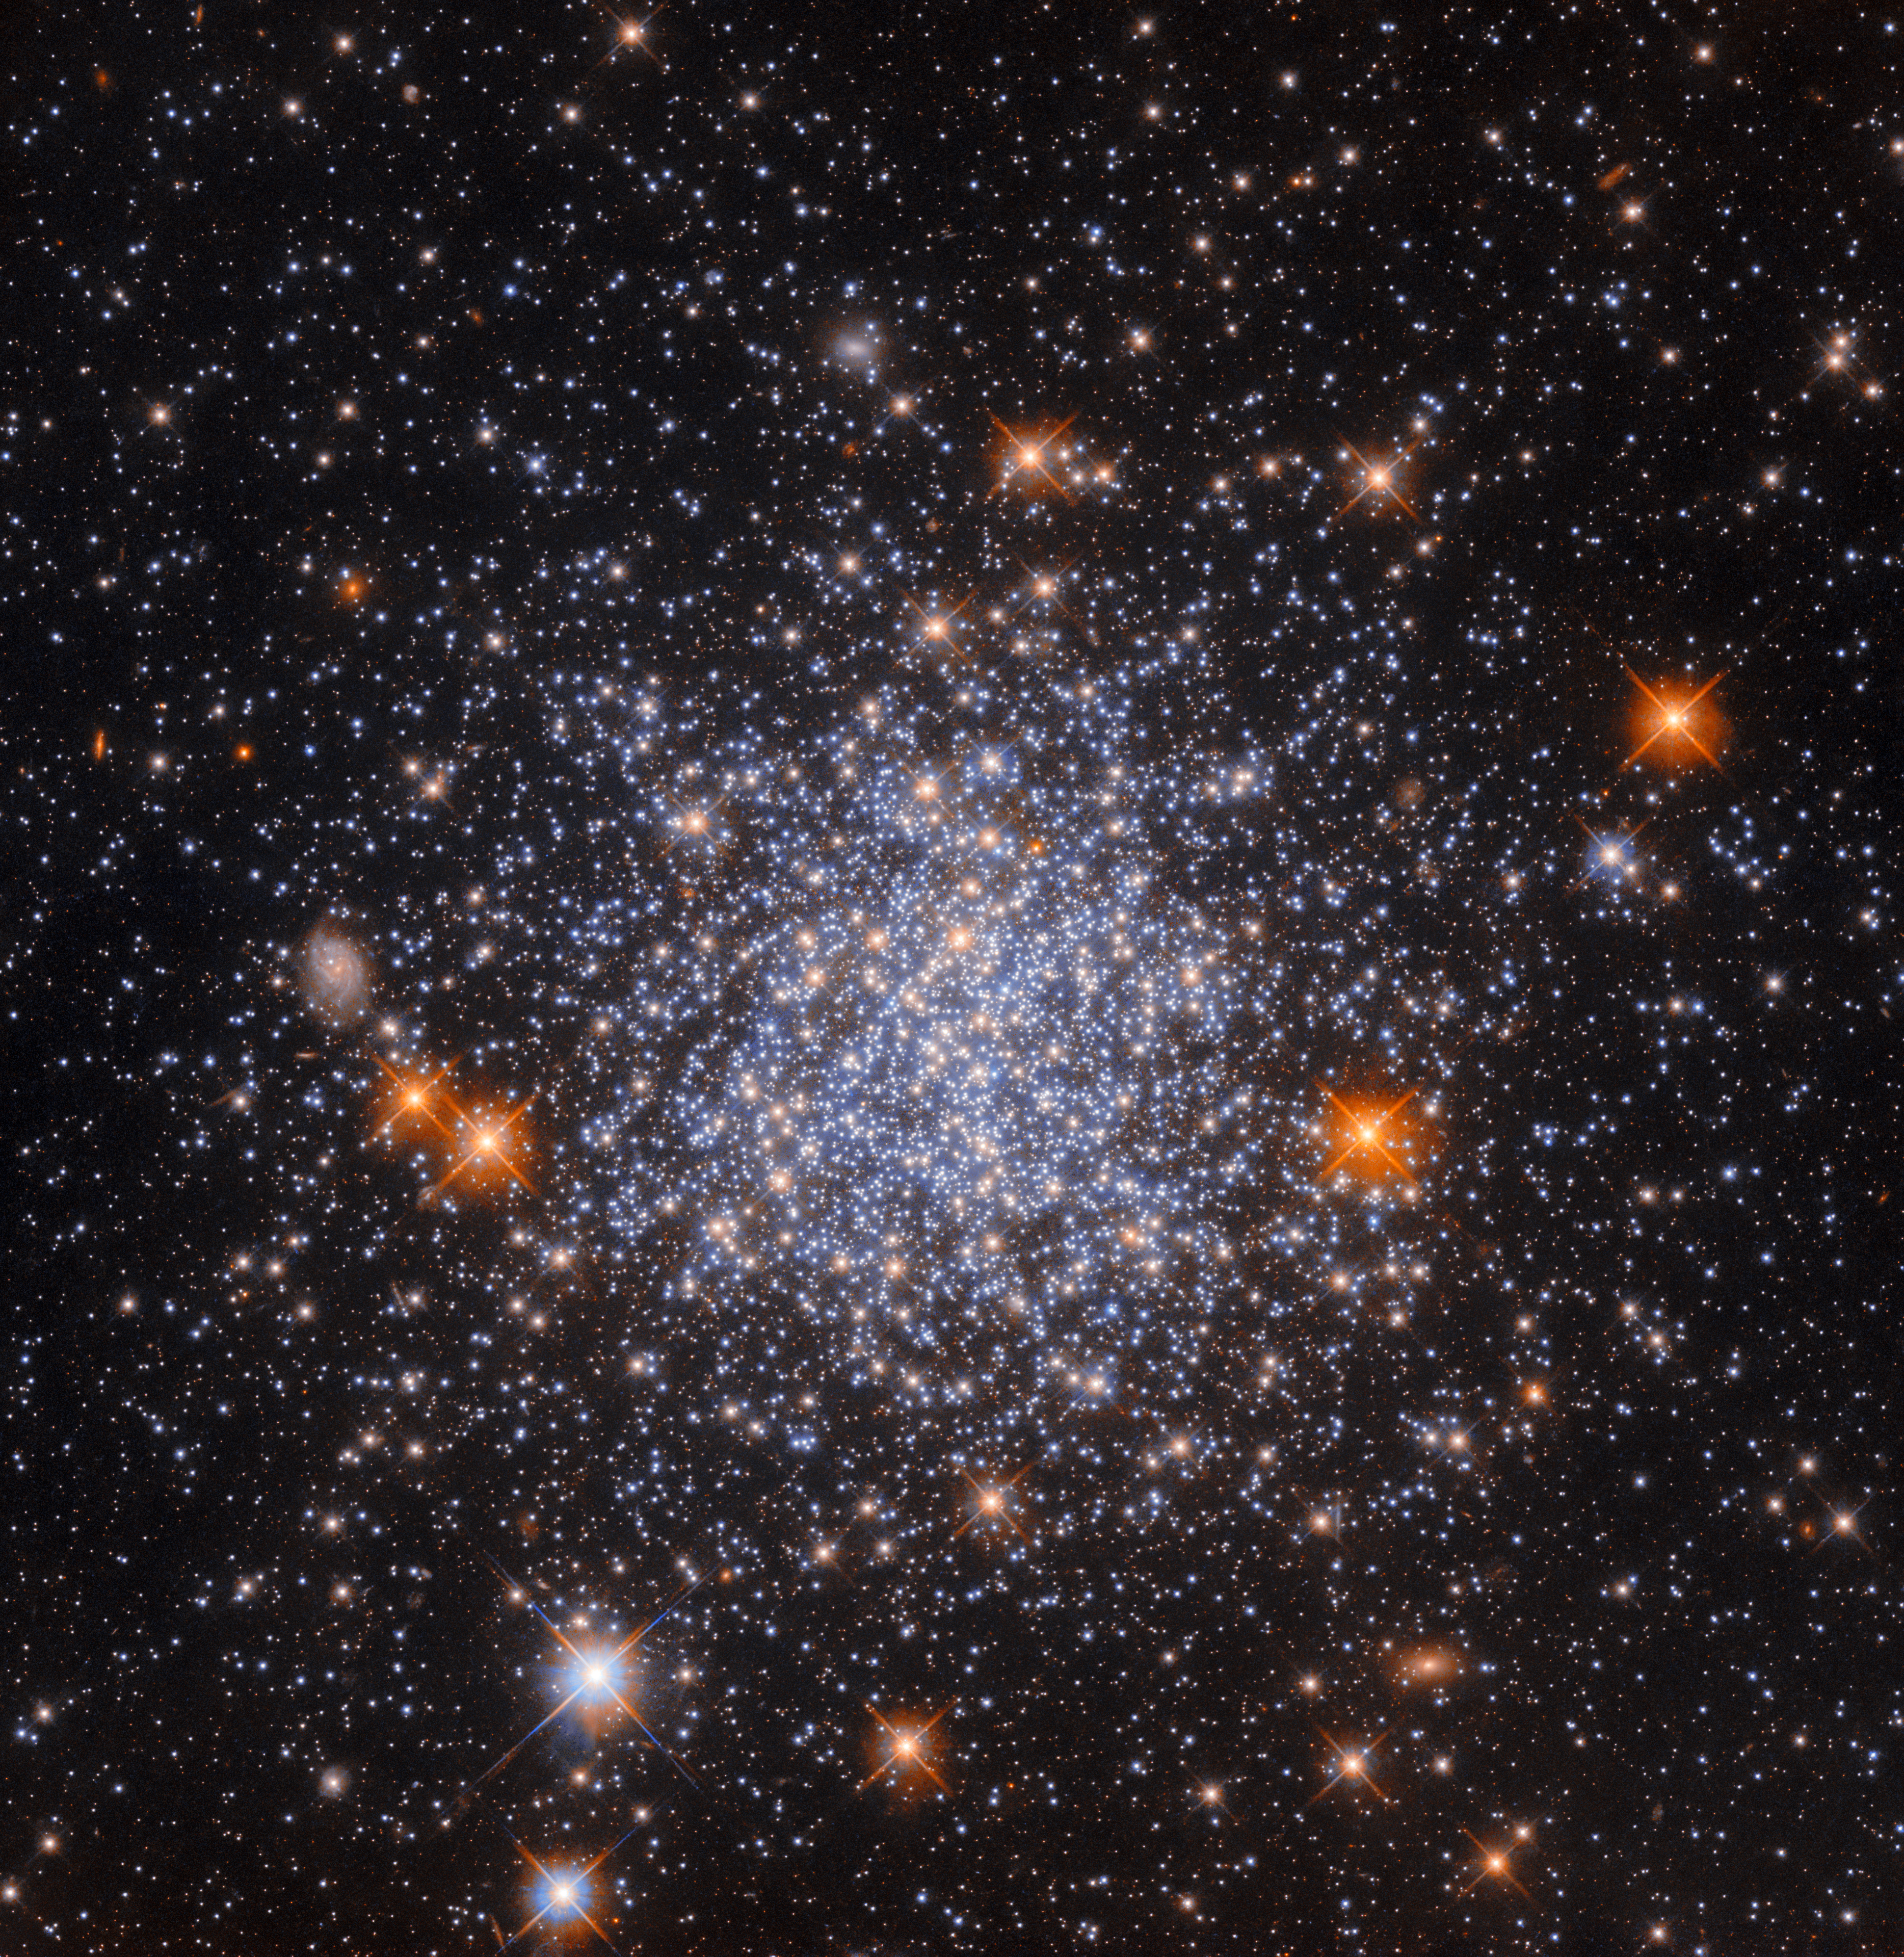

No zoom

This image shows a globular cluster known as NGC 1651. Like the object in another recent Picture of the Week, it is located about 162 000 light-years away in the largest and brightest of the Milky Way’s satellite galaxies, the Large Magellanic Cloud (LMC). A notable feature of this image is that the globular cluster almost fills the entire image, even though globular clusters are only about 10 to 300 light-years in diameter (NGC 1651 has a diameter of roughly 120 light-years). In contrast, there are numerous Hubble Pictures of the Week that feature entire galaxies — which can be tens or hundreds of millions of light-years in diameter — that also more or less fill the whole image.

A common misconception is that Hubble and other large telescopes manage to observe wildly differently sized celestial objects by zooming in on them, as one would with a specialised camera here on Earth. However, whilst small telescopes might have the option to zoom in and out to a certain extent, large telescopes do not. Each telescope’s instrument has a fixed ‘field of view’ (the size of the region of sky that it can observe in a single observation). For example, the ultraviolet/visible light channel of Hubble’s Wide Field Camera 3 (WFC3), the channel and instrument that were used to collect the data used in this image, has a field of view roughly one twelfth the diameter of the Moon as seen from Earth. Whenever WFC3 makes an observation, that is the size of the region of sky that it can observe.

The reason that Hubble can observe objects of such wildly different sizes is two-fold. Firstly, the distance to an object will determine how big it appears to be from Earth, so entire galaxies that are relatively far away might take up the same amount of space in the sky as a globular cluster like NGC 1651 that is relatively close by. In fact, there's a distant spiral galaxy lurking in this image, directly left of the cluster — though undoubtedly much larger than this star cluster, it appears small enough here to blend in with foreground stars! Secondly, multiple images spanning different parts of the sky can be mosaiced together to create single images of objects that are too big for Hubble’s field of view. This is a very complex task and is not typically done for Pictures of the Week, but it has been done for some of Hubble’s most iconic images.

Credit: ESA/Hubble & NASA, L. Girardi, F. Niederhofer